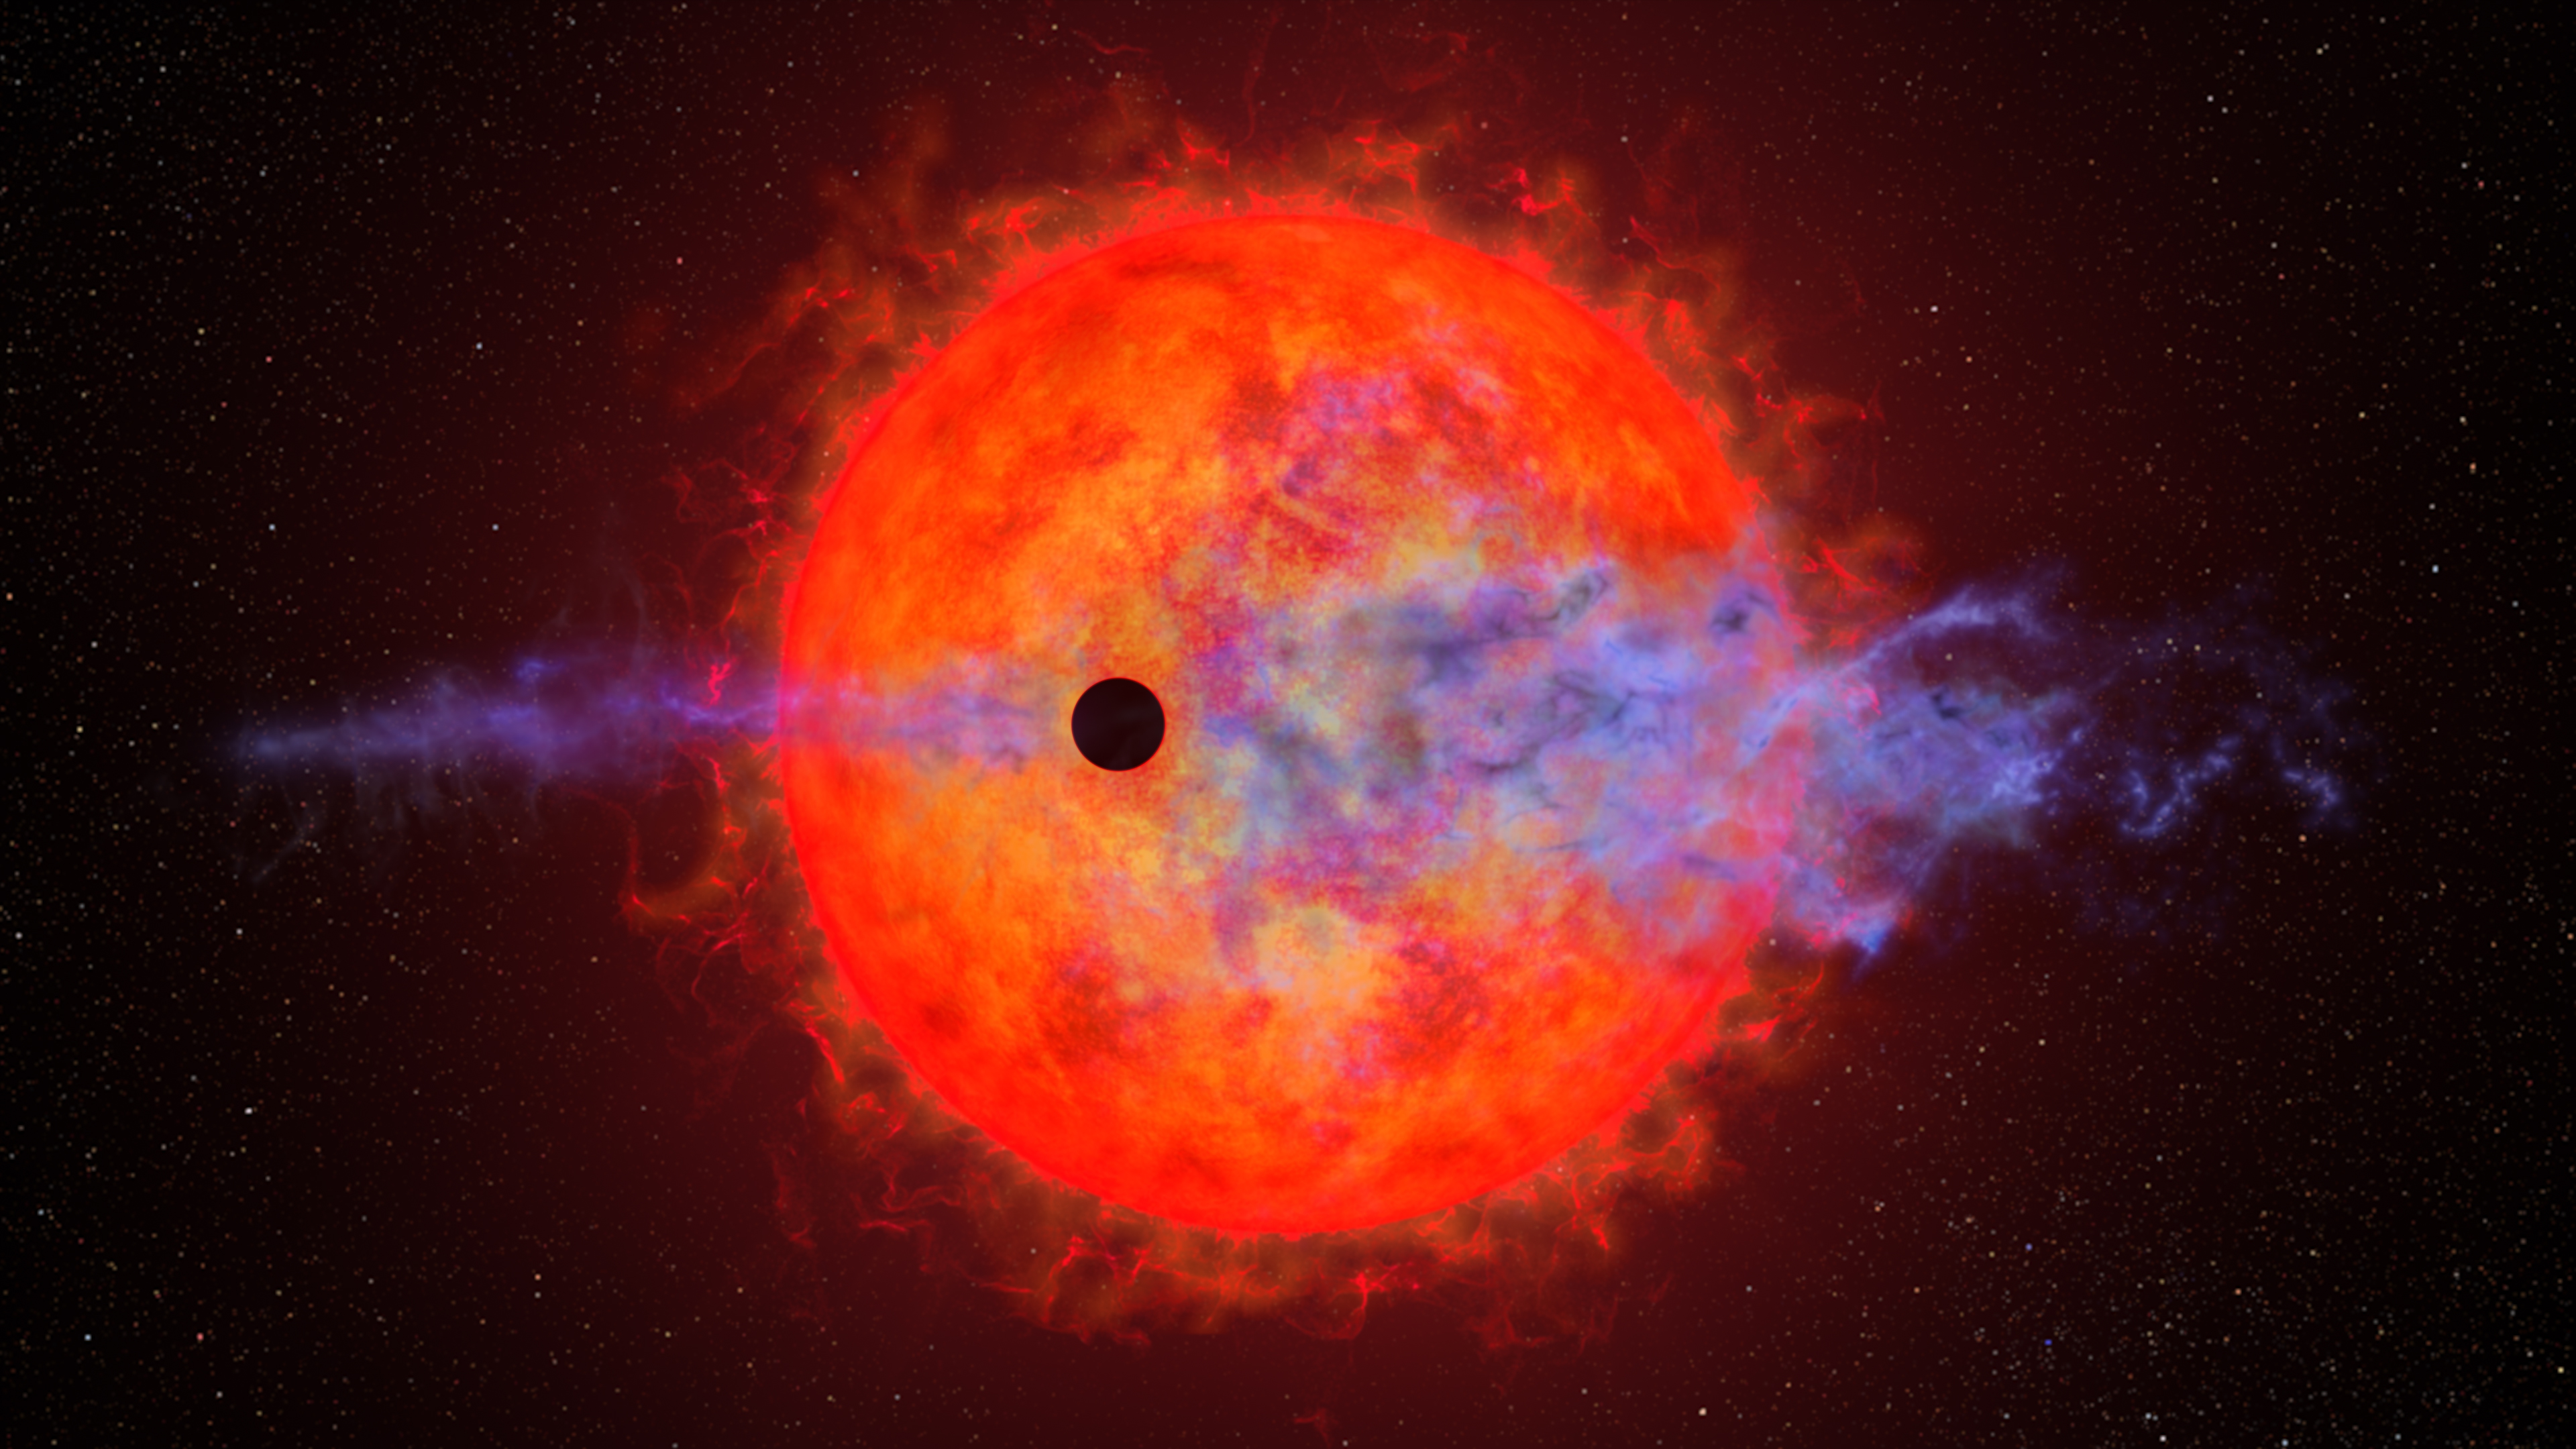

Hubble sees evaporating planet getting the hiccups

A young planet whirling around a petulant red dwarf star is changing in unpredictable ways orbit-by-orbit. It is so close to its parent star that it experiences a consistent, torrential blast of energy, which evaporates its hydrogen atmosphere — causing it to puff off the planet.

Located 32 light-years from Earth, the parent star AU Microscopii (AU Mic) hosts one of the youngest planetary systems ever observed. The star is less than 100 million years old (a tiny fraction of the age of our Sun, which is 4.6 billion years old). The innermost planet, AU Mic b, has an orbital period of 8.46 days and is just 6 million miles from the star (about 1/10th the planet Mercury's distance from our Sun). The bloated, gaseous world is about four times Earth's diameter.

During one orbit observed with the NASA/ESA Hubble Space Telescope, AU Mic b looked like it wasn't losing any material at all, while an orbit observed with Hubble a year and a half later showed clear signs of atmospheric loss. This extreme variability between orbits shocked astronomers. They were equally puzzled to see, when it was detectable, the planet's atmosphere puffing out in front of the planet, like a headlight on a fast-bound train.

The never-before-seen changes in atmospheric outflow from AU Mic b may indicate swift and extreme variability in the host red dwarf's outbursts. One possible explanation for the missing hydrogen is that a powerful stellar flare, seen seven hours prior, may have photoionized the escaping hydrogen to the point where it became transparent to light. Another explanation is that AU Mic’s stellar wind is shaping the planetary outflow, making it observable at some times and not observable at other times, even causing some of the outflow to "hiccup" ahead of the planet itself.

Hubble follow-up observations of more AU Mic b transits should offer additional clues to the star and planet's odd variability, further testing scientific models of exoplanetary atmospheric escape and evolution.

These results are featured in the paper published on 27th July 2023 in The Astronomical Journal.

Credit: NASA, ESA, J. Olmsted (STScI)